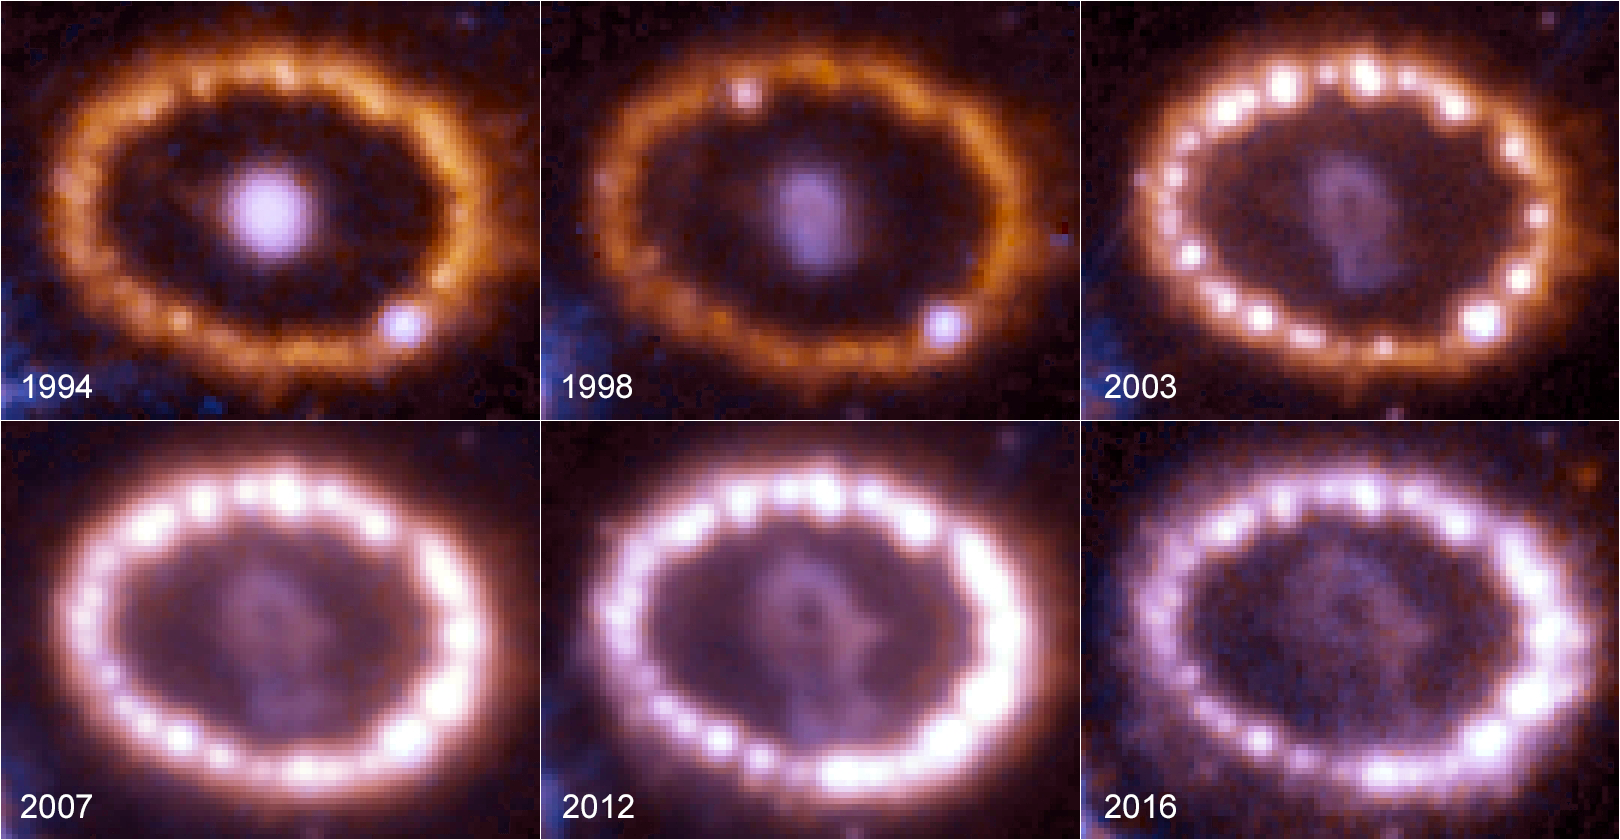

Supernova 1987A over time

This montage shows the evolution of the supernova 1987A between 1994 and 2016, as seen by the NASA/ESA Hubble Space Telescope.

The supernova explosion was first spotted in 1987 and is among the brightest supernova within the last 400 years. Hubble began observing the aftermath of the explosion shortly after it was launched in 1990.

The growing number of bright spots on the ring was produced by an onslaught of material unleashed by the explosion. The shock wave of material hit the ring’s innermost regions, heating them up, and causing them to glow. The ring, about one light-year across, was probably shed by the star about 20,000 years before the star exploded.

Credit: NASA, ESA, and R. Kirshner (Harvard-Smithsonian Center for Astrophysics and Gordon and Betty Moore Foundation) and P. Challis (Harvard-Smithsonian Center for Astrophysics)